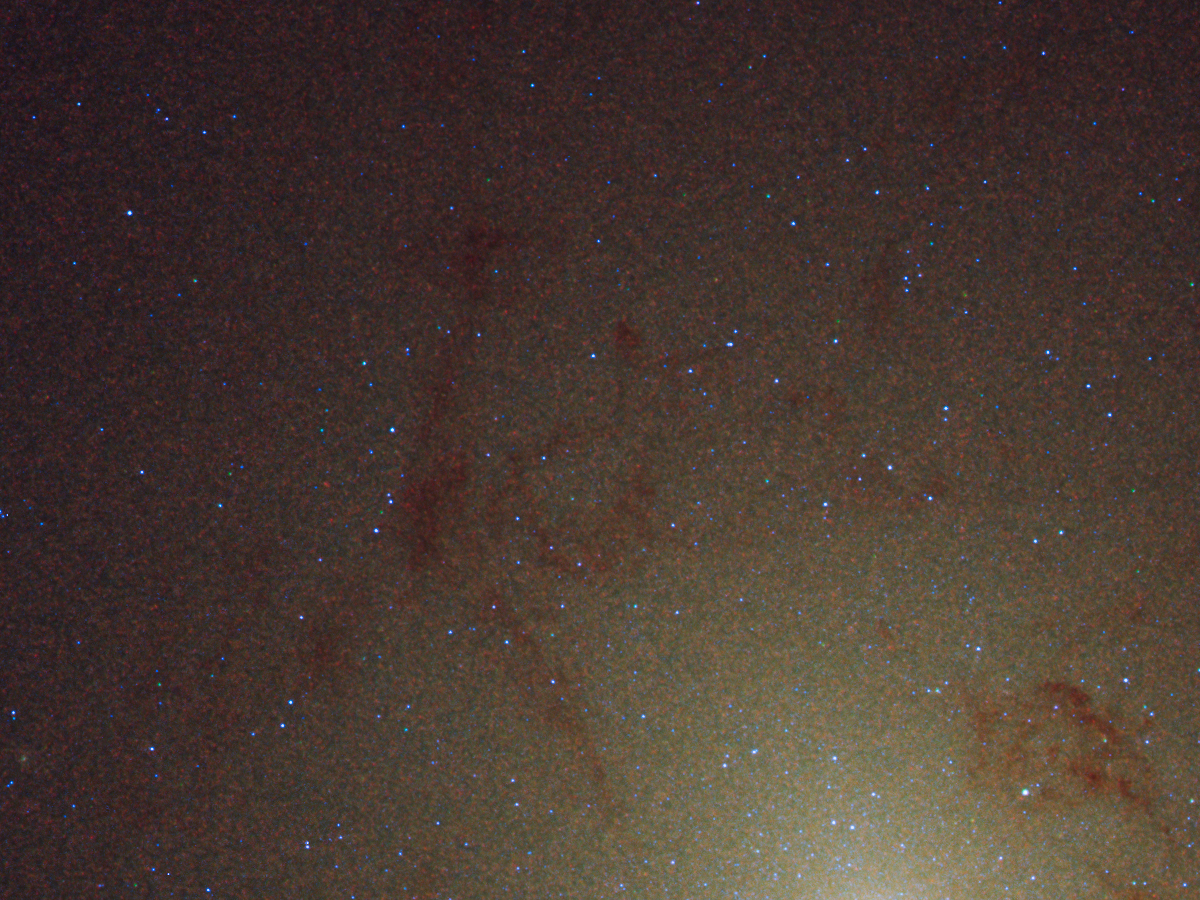

HST PHAT detail of M31

This detailed image reveals a rich population of blue stars huddled around the core. Dark dust clouds also are visible. The image is 740 light-years wide. The image is part of a census of stars in M31 called the Panchromatic Hubble Andromeda Treasury survey.

Credit: NASA, ESA, and B. Williams and J. Dalcanton (University of Washington, Seattle)